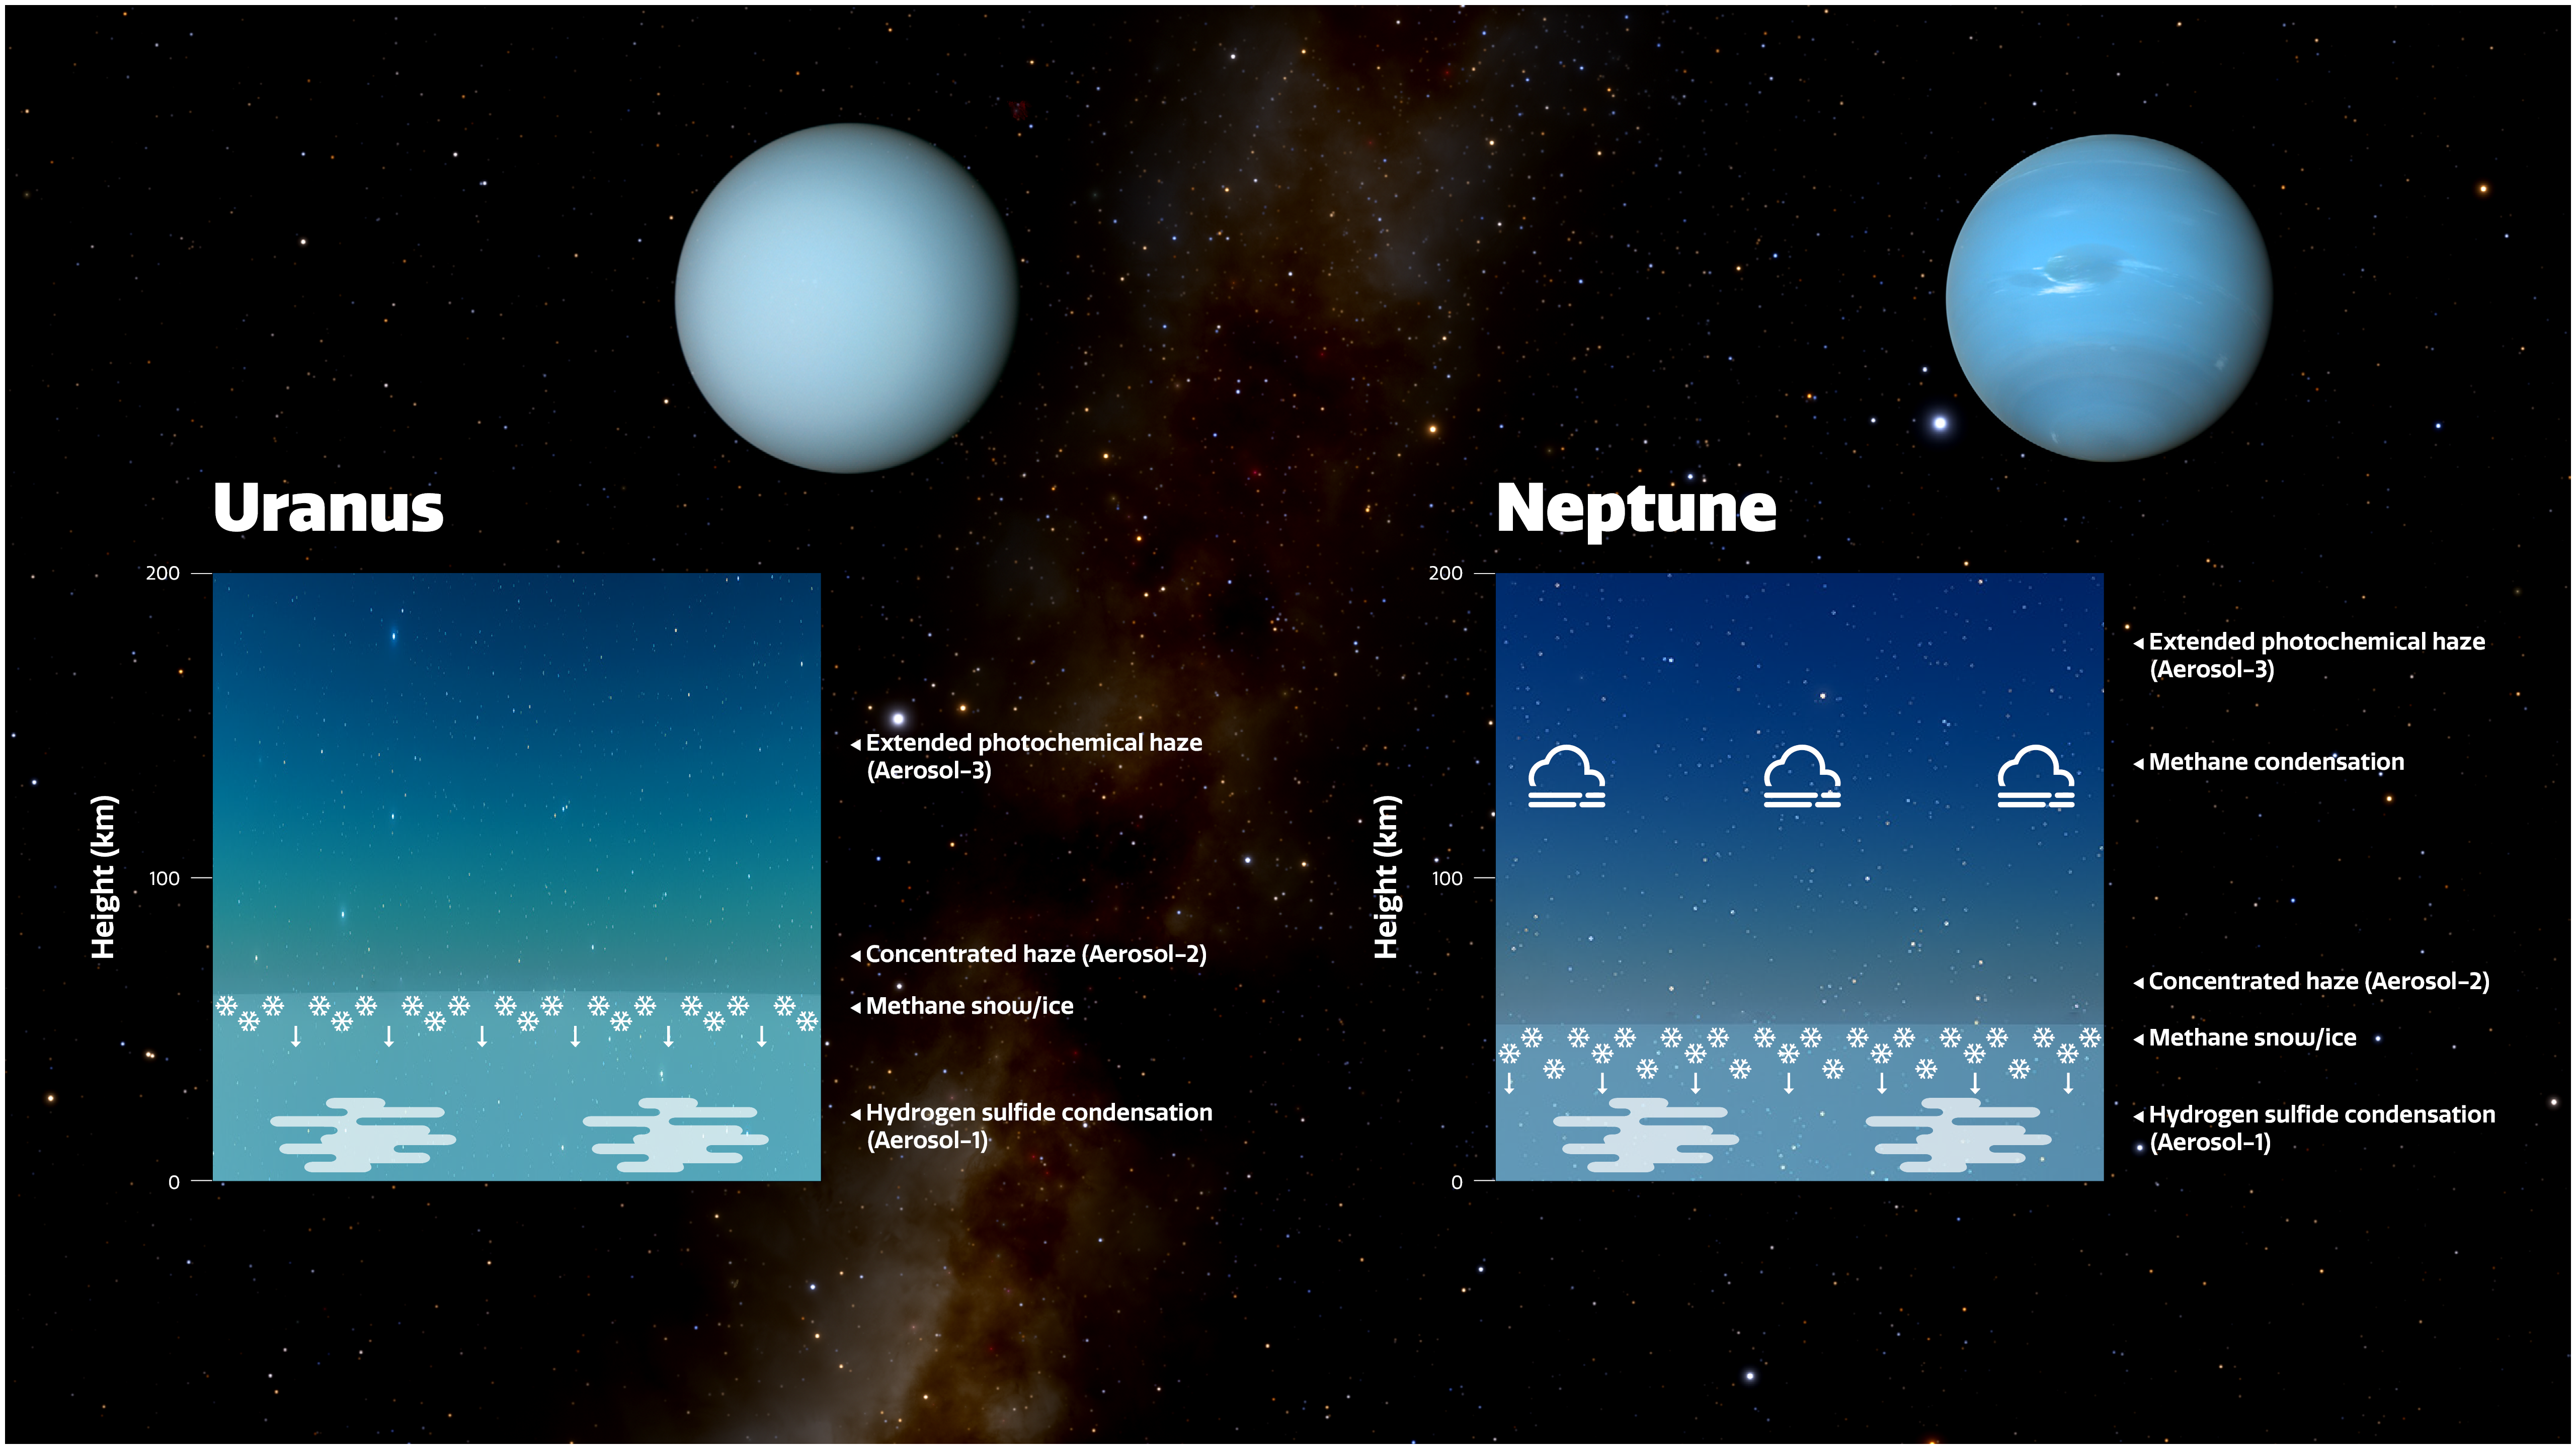

Diagram of the Atmospheres of Uranus and Neptune

This diagram shows three layers of aerosols in the atmospheres of Uranus and Neptune, as modelled by a team of scientists. The height scale on the diagram represents the pressure above 10 bar.

The deepest layer (the Aerosol-1 layer) is thick and composed of a mixture of hydrogen sulphide ice and particles produced by the interaction of the planets’ atmospheres with sunlight.

The key layer that affects the colours is the middle layer, which is a layer of haze particles (referred to in the paper as the Aerosol-2 layer) that is thicker on Uranus than on Neptune. The team suspects that, on both planets, methane ice condenses onto the particles in this layer, pulling the particles deeper into the atmosphere in a shower of methane snow. Because Neptune has a more active, turbulent atmosphere than Uranus does, the team believes Neptune’s atmosphere is more efficient at churning up methane particles into the haze layer and producing this snow. This removes more of the haze and keeps Neptune’s haze layer thinner than it is on Uranus, meaning the blue colour of Neptune looks stronger.

Above both of these layers is an extended layer of haze (the Aerosol-3 layer) similar to the layer below it but more tenuous. On Neptune, large methane ice particles also form above this layer.

Credit: International Gemini Observatory/NOIRLab/NSF/AURA, J. da Silva / NASA /JPL-Caltech /B. Jónsson